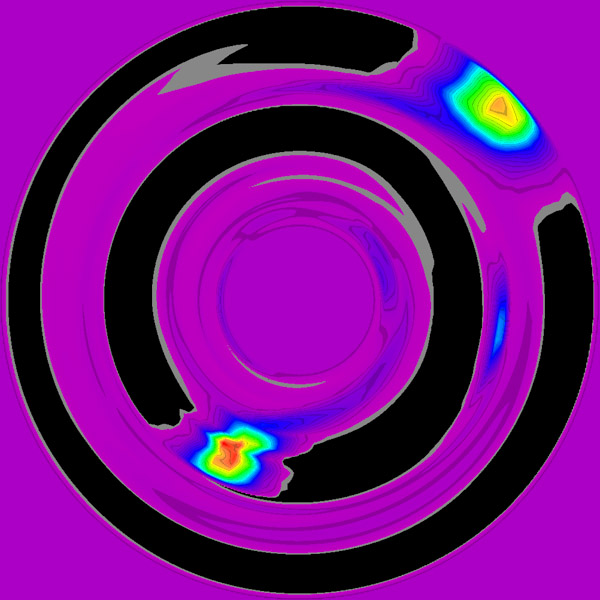

Simulated image of planetary formation

False colour image of two gas giant protoplanets that have formedquickly in a disk of gas and dust. Each of the two protoplanets(yellow-red blobs) contains several Jupiter-masses of gas and dust.They orbit at distances of about 5 and 10 times the Earth's distancefrom the Sun in this theoretical model, at the orbital distances ofJupiter and Saturn in our own solar system. The protoplanetssweep up all the gas close to their orbits, leaving behind emptygaps (black) in the disk (purple). A solar-type star lies unseenat the center of the disk. These protoplanets formed in about 1000 years by the fastest known mechanism, the disk instabilitymechanism. If this star had a close binary star companion, theseprotoplanets might well be ejected outward from these otherwisestable orbits.

Credit: A. Boss (Carnegie Institute of Washington)